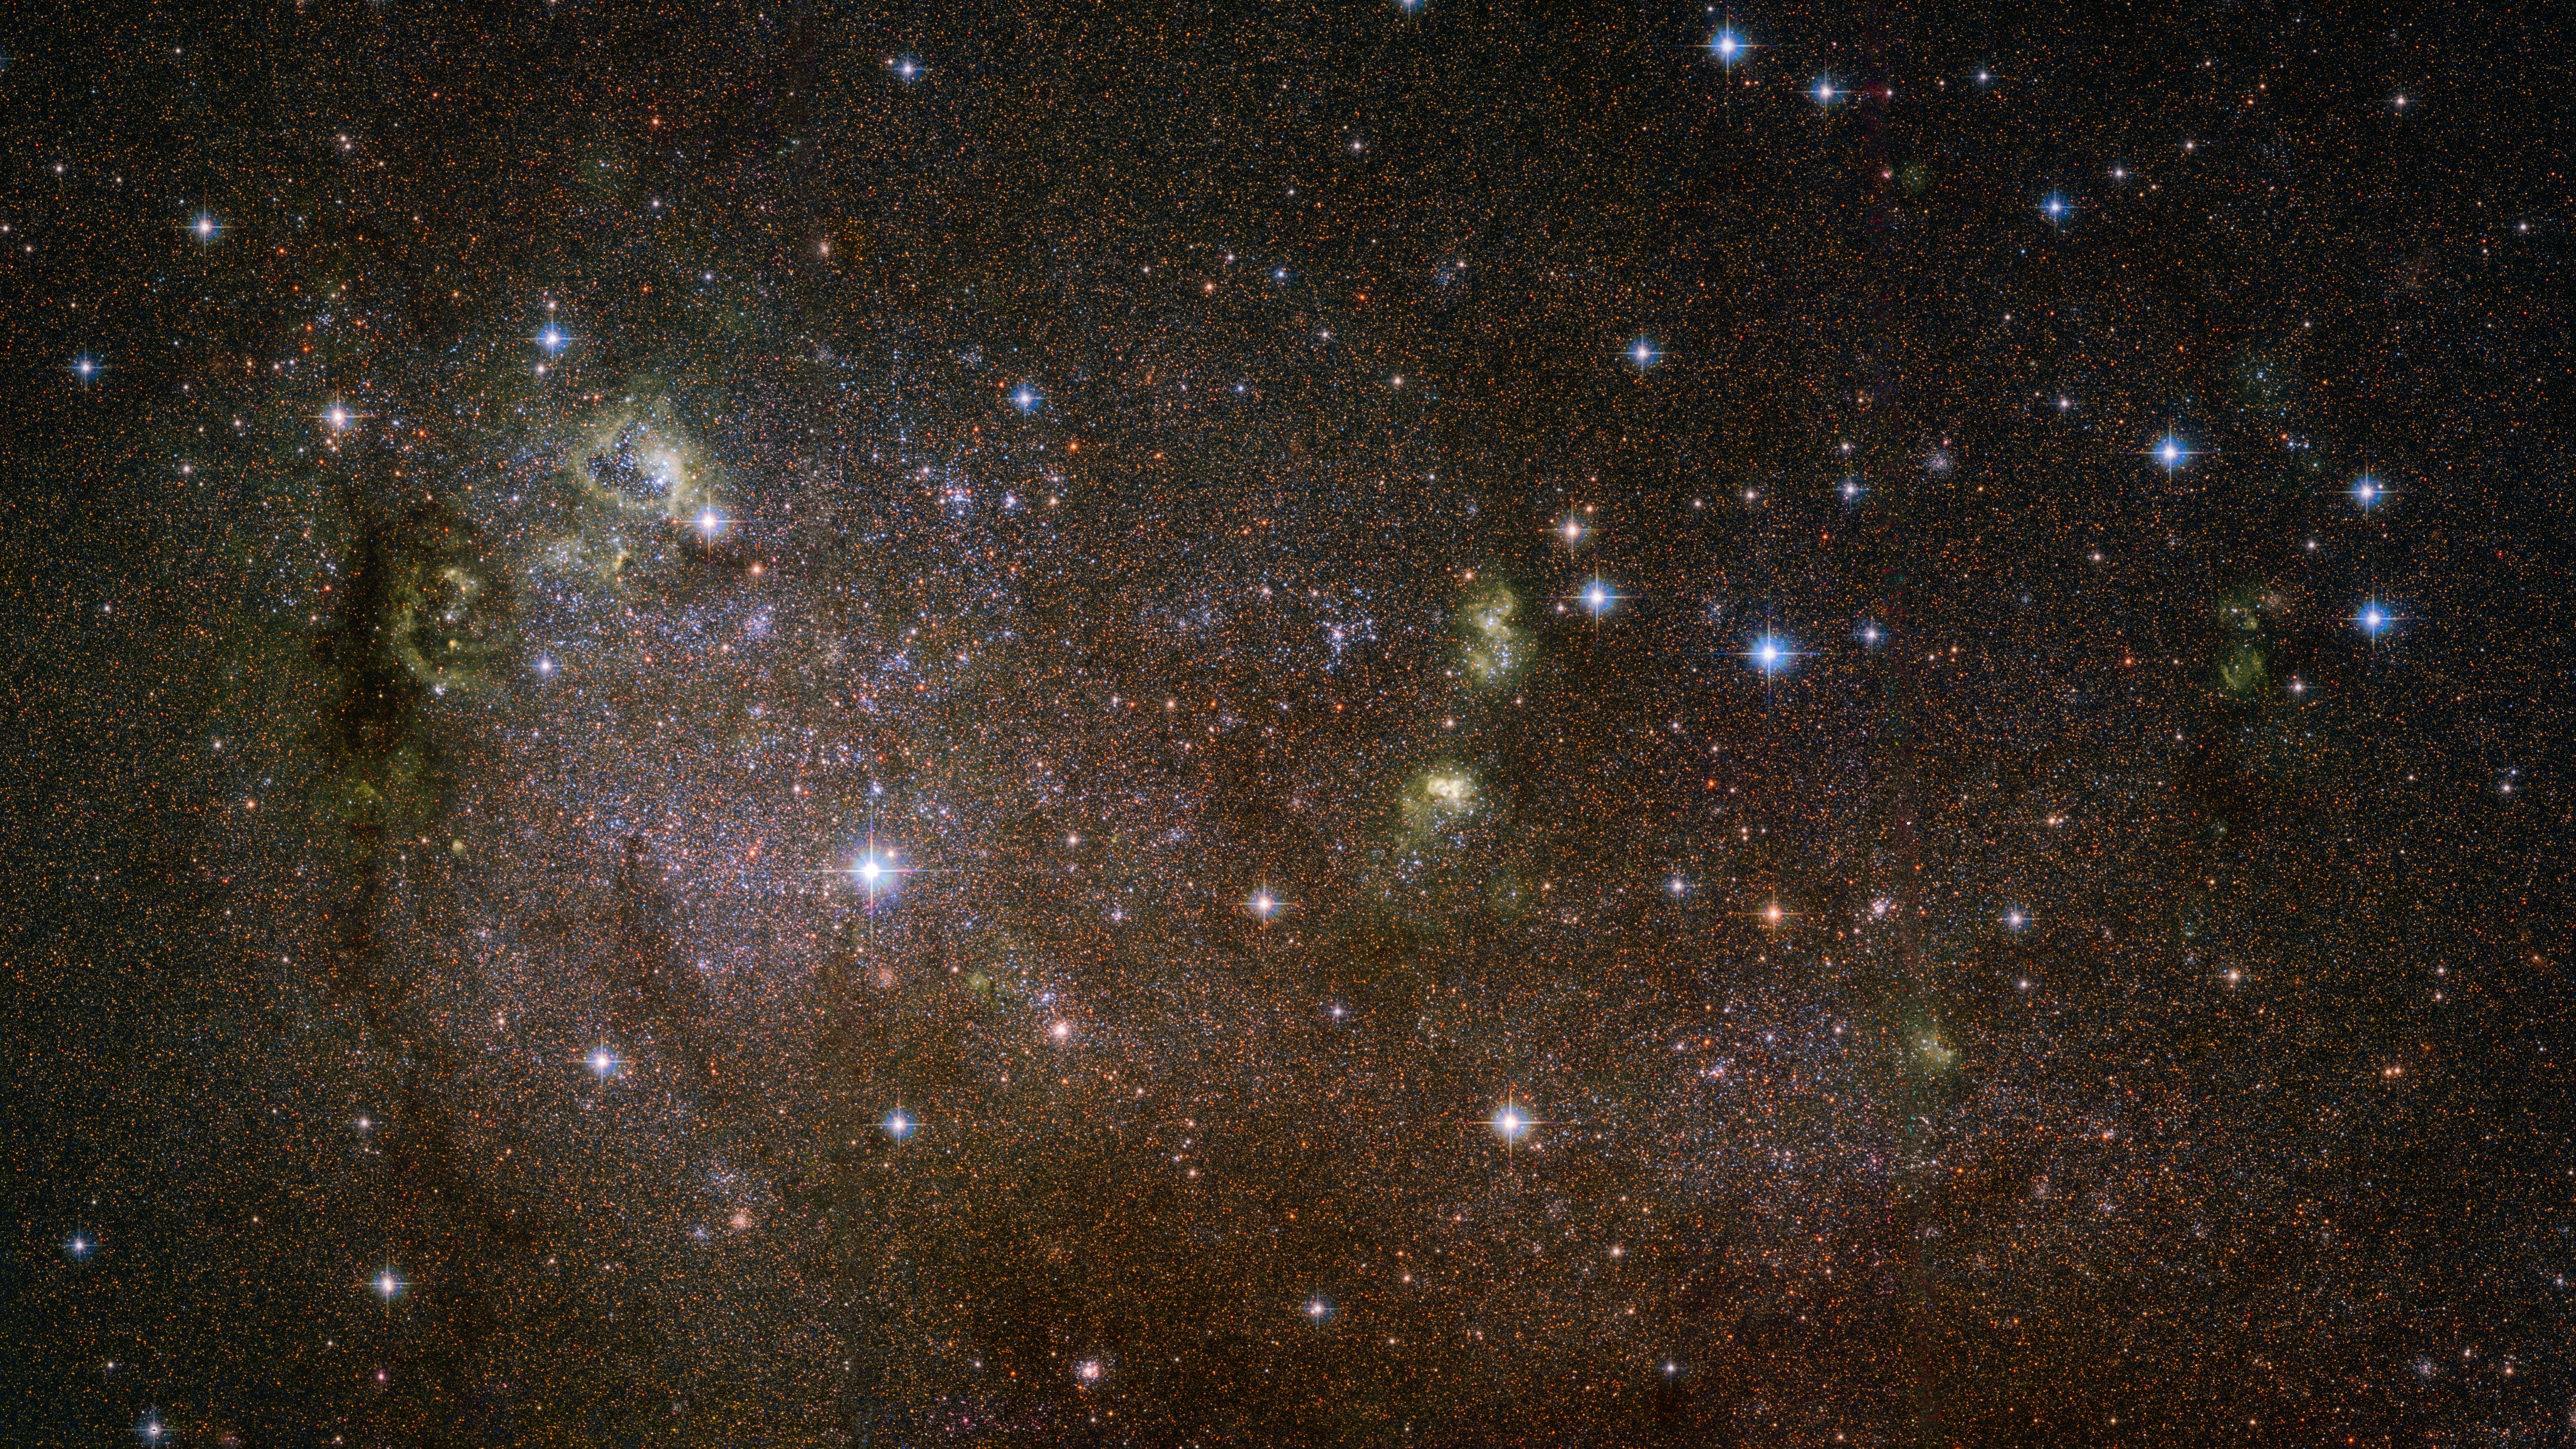

Spiral, elliptical, irregular

This image shows an irregular galaxy named IC 10, a member of the Local Group — a collectiongrouping of over 50 galaxies inwithin our cosmic neighbourhood that includes the Milky Way.

IC 10 is a remarkable object. It is the closest-known starburst galaxy to us, meaning that it is undergoing a furious bout of star formation fueled by ample supplies of cool hydrogen gas. This gas condenses into vast molecular clouds, which then form into dense knots where pressures and temperatures reach a point sufficient to ignite nuclear fusion, thus giving rise to new generations of stars.

As an irregular galaxy, IC 10 lacks the majestic shape of spiral galaxies such as the Milky Way, or the rounded, ethereal appearance of elliptical galaxies. It is a faint object, despite its relative proximity to us — justof 2.2 million light-years. In fact, IC 10 only became known to humankind in 1887, when American astronomer Lewis Swift spotted it during an observing campaign. The small galaxy remains difficult to study even today, because it is located along a line-of-sight which is chock-full of cosmic dust and stars.

A version of this image was entered into the Hubble's Hidden Treasures image processing competition by contestant Nikolaus Sulzenauer, and went on to win tenth prize.

Credit: NASA, ESA and F. Bauer